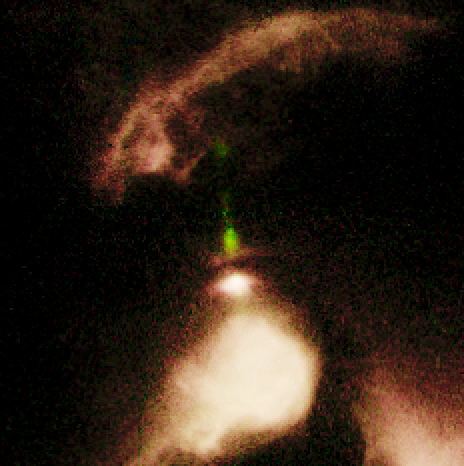

Disk Around Young Star. A View of Haro 6-5B

Haro 6-5B is a nearly edge-on disk surrounded by a complex mixture of wispy clouds of dust and gas. In this WFPC2 image, the central star is partially hidden by the disk, but can be pinpointed by the stubby jet (shown in green), which it emits. The dark disk extends 32 billion miles (about 51 billion kilometres) across at a 90-degree angle to the jet.

Credit: John Krist (STScI), the WFPC2 Science Team and NASA/ESA